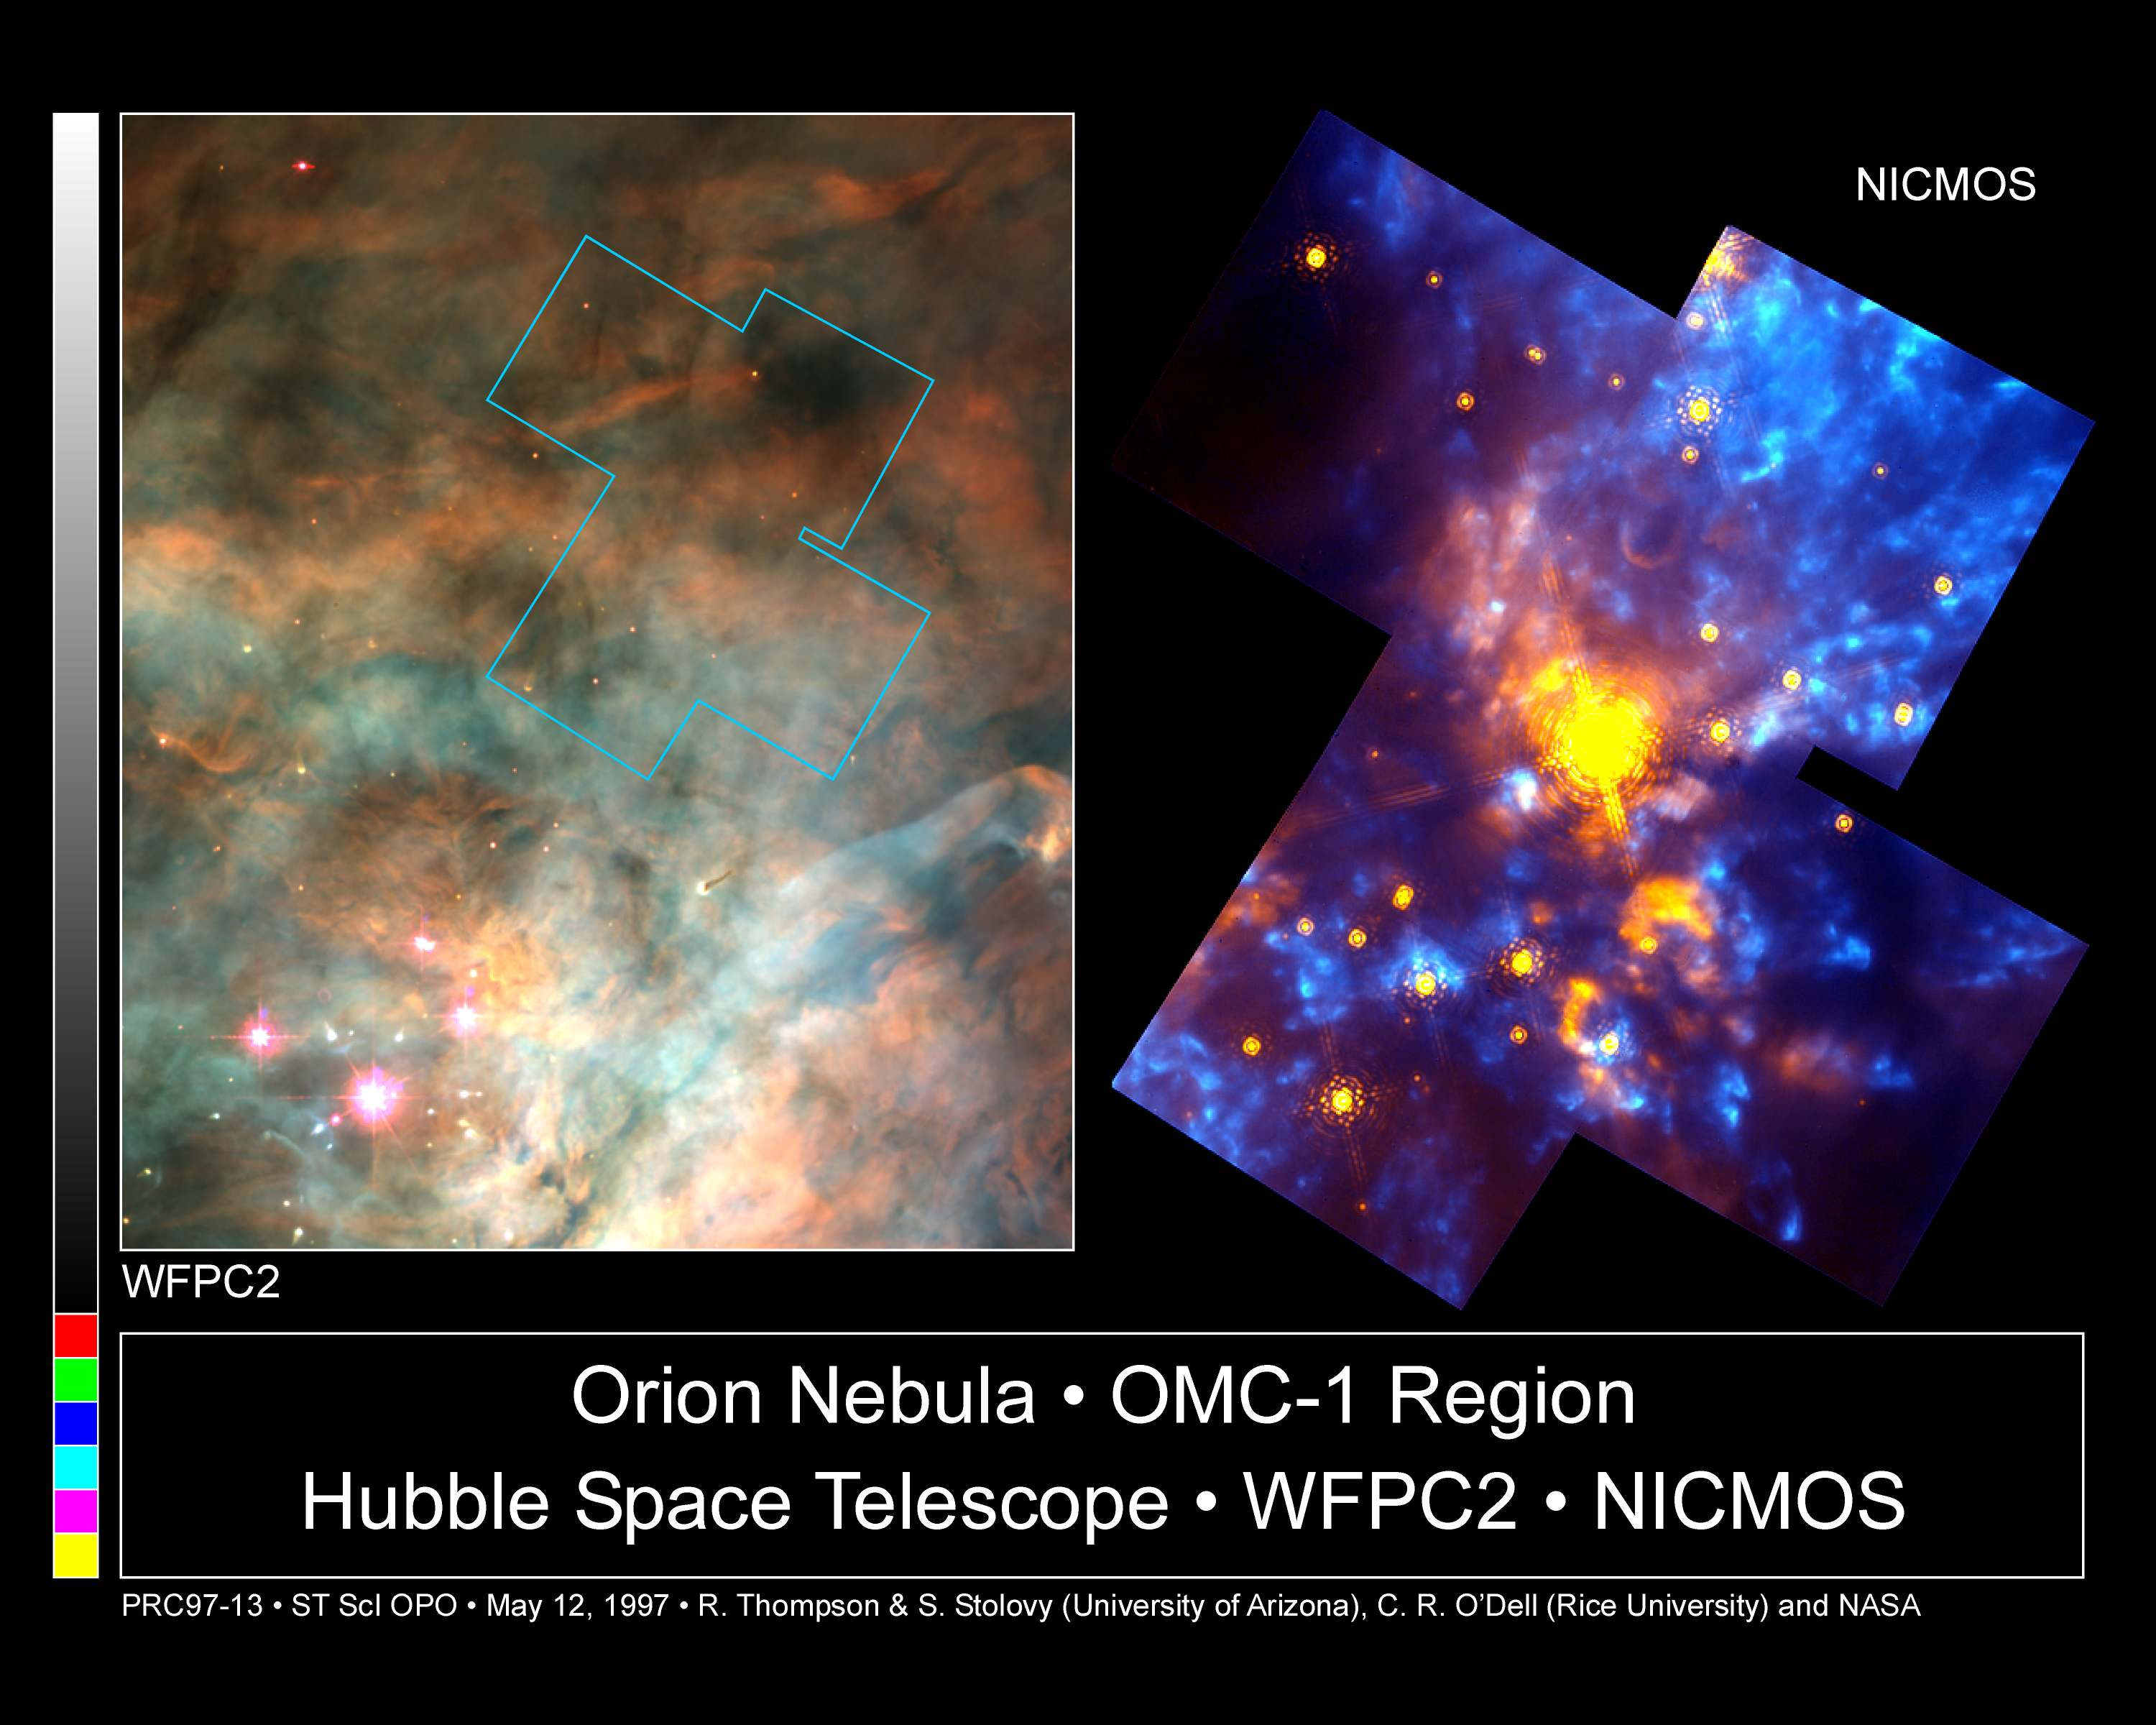

The Orion Nebula OMC-1 Region

The infrared vision of the Hubble Space Telescope's Near Infrared Camera and Multi-Object Spectrometer (NICMOS) is providing a dramatic new look at the beautiful Orion Nebula which contains the nearest nursery for massive stars. For comparison, Hubble's Wide Field and Planetary Camera 2(WFPC2) image on the left shows a large part of the nebula as it appears in visible light.

Credit: Rodger Thompson, Marcia Rieke, Glenn Schneider, Susan Stolovy (University of Arizona); Edwin Erickson (SETI Institute/Ames Research Center); David Axon (STScI), C. Robert O'Dell, Shui Kwan Wong(Rice University) and NASA/ESA